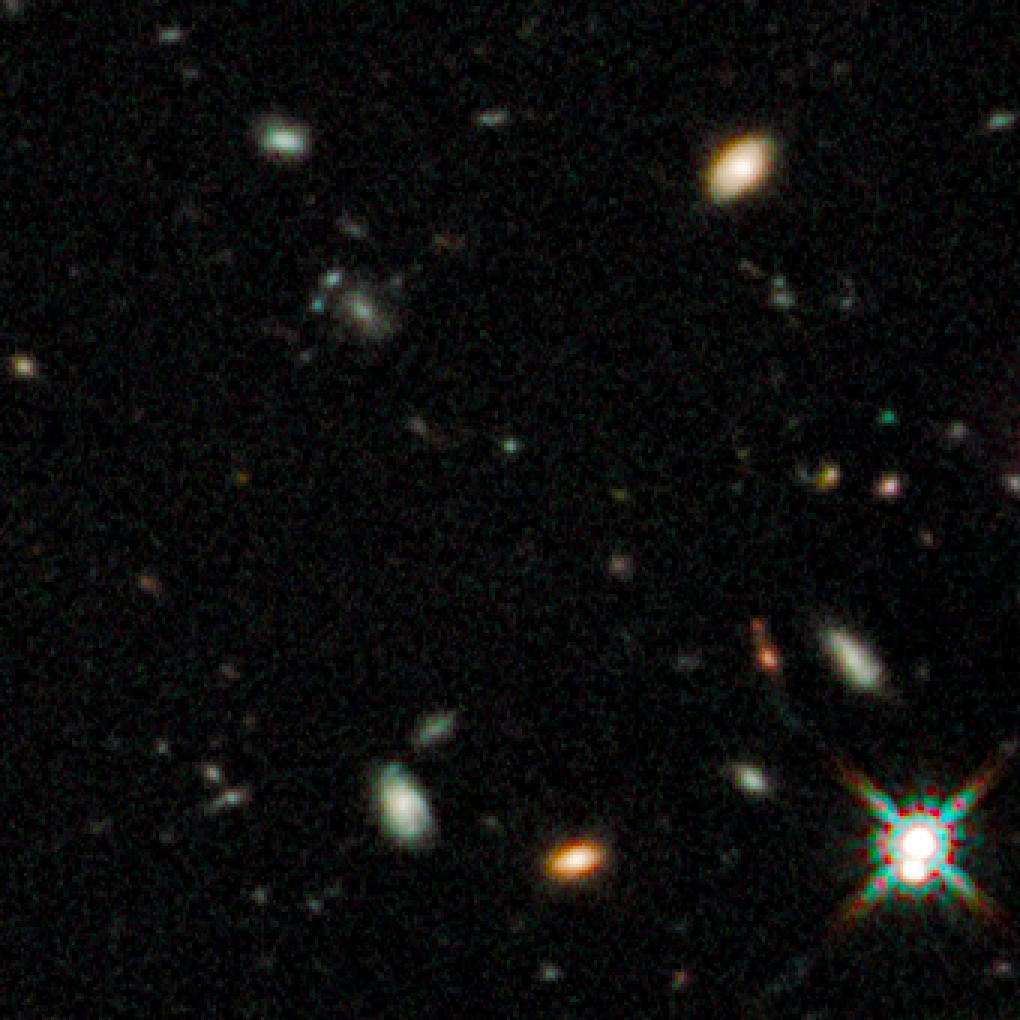

Early galaxies in HUDF WFC3/IR, close up 1

This Hubble image taken by the observatory’s new Wide Field Camera 3 in Infrared highlights some of the oldest galaxies ever seen.

Credit: NASA, ESA, G. Illingworth (UCO/Lick Observatory and University of California, Santa Cruz) and the HUDF09 Team